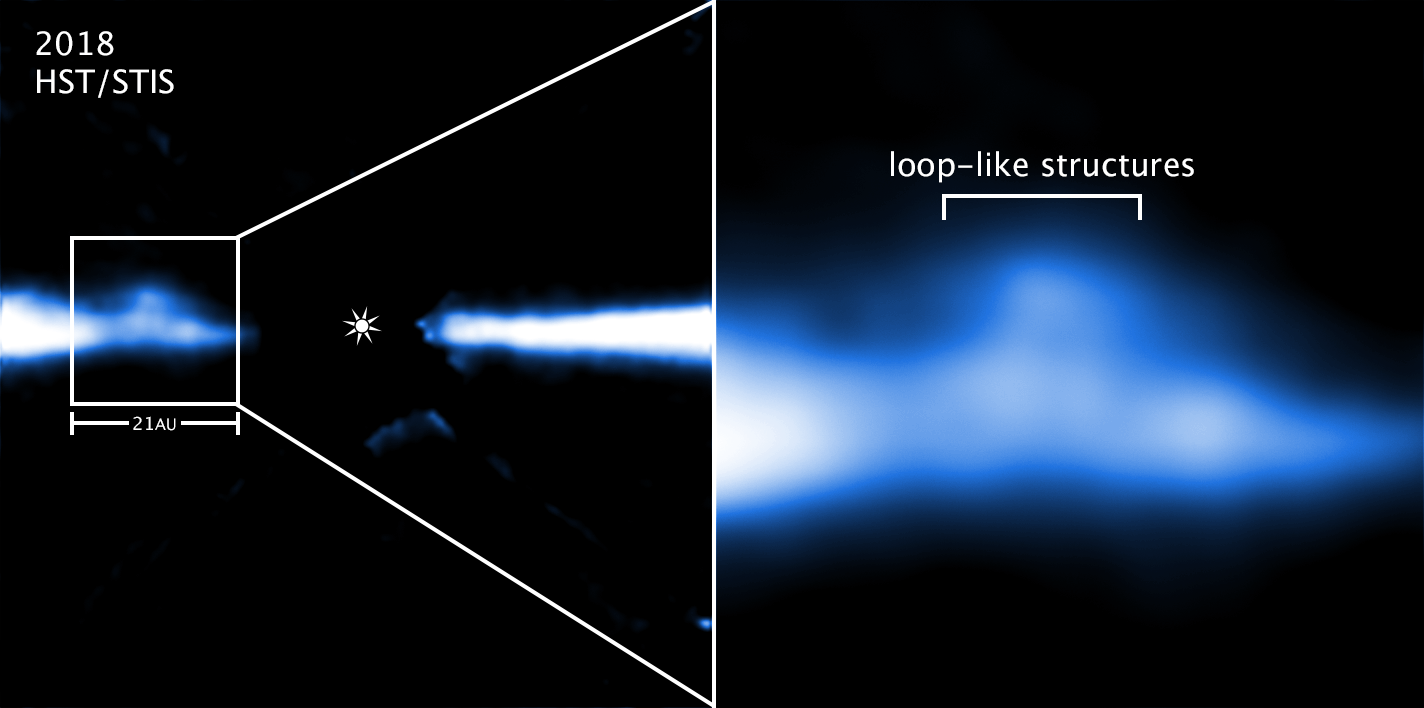

Hubble captures intricate structures inside a giant migrating blob

The NASA/ESA Hubble Space Telescope image on the left is an edge-on view of a portion of a vast debris disc around the young, nearby red dwarf star AU Microscopii (AU Mic). Though planets may have already formed in the disc, Hubble is tracking the movement of several huge blobs of material that could be "snowplowing" remaining debris out of the system, including comets and asteroids.

The box in the image at left highlights one blob of material extending above and below the disc. Hubble's Space Telescope Imaging Spectrograph (STIS) took the picture in 2018, in visible light. The glare of the star, located at the centre of the disc, has been blocked out by the STIS coronagraph so that astronomers can see more structure in the disc.

The STIS close-up image at right reveals, for the first time, details in the blobby material, including a loop-like structure and a mushroom-shaped cap. Astronomers expect the train of blobs to clear out the disk within only 1.5 million years. The consequences are that any rocky planets could be left bone-dry and lifeless, because comets and asteroids will no longer be available to glaze the planets with water or organic compounds.

AU Mic is approximately 23 million years old. The system resides 32 light-years away in the southern constellation Microscopium.

Credit: NASA, ESA, J. Wisniewski (University of Oklahoma), C. Grady (Eureka Scientific), and G. Schneider (Steward Observatory)